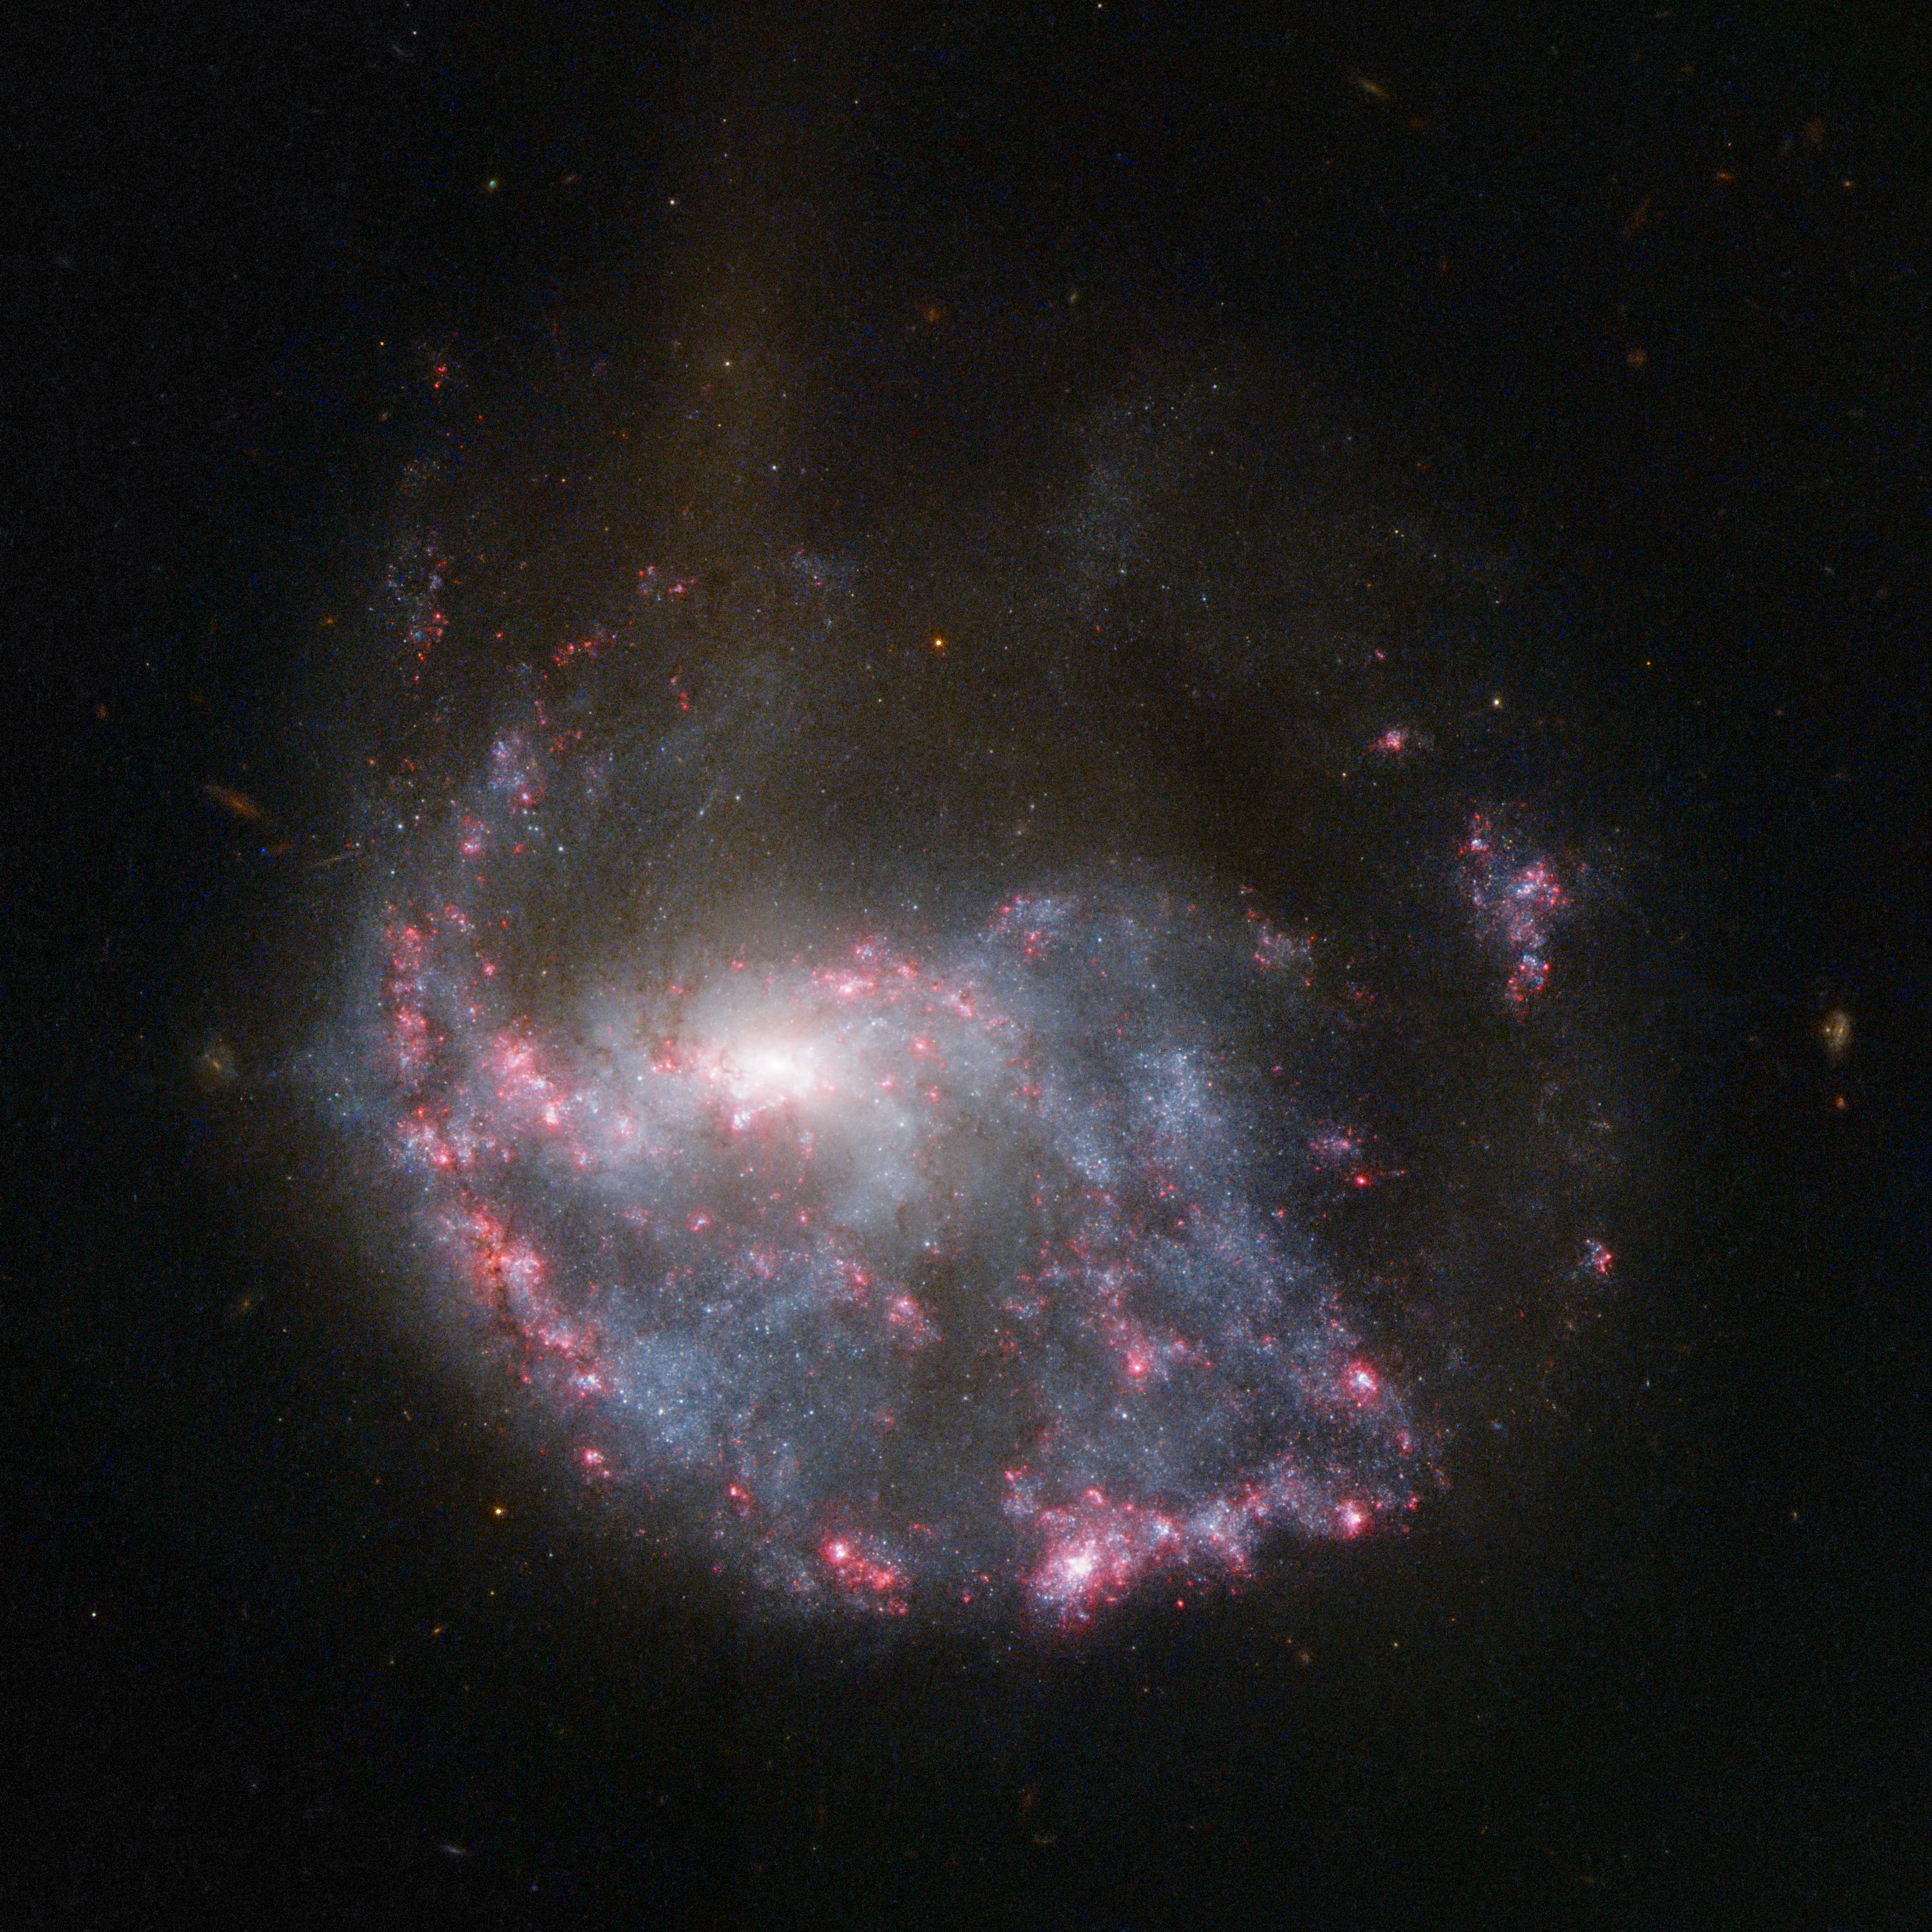

Hubble view of NGC 922

An almost complete circle of bright pink nebulae skirts around a spiral galaxy in this NASA/ESA Hubble Space Telescope image of NGC 922. The ring structure and the galaxy’s distorted spiral shape result from a smaller galaxy scoring a cosmic bullseye, hitting the centre of NGC 922 some 330 million years ago.

Credit: NASA, ESA